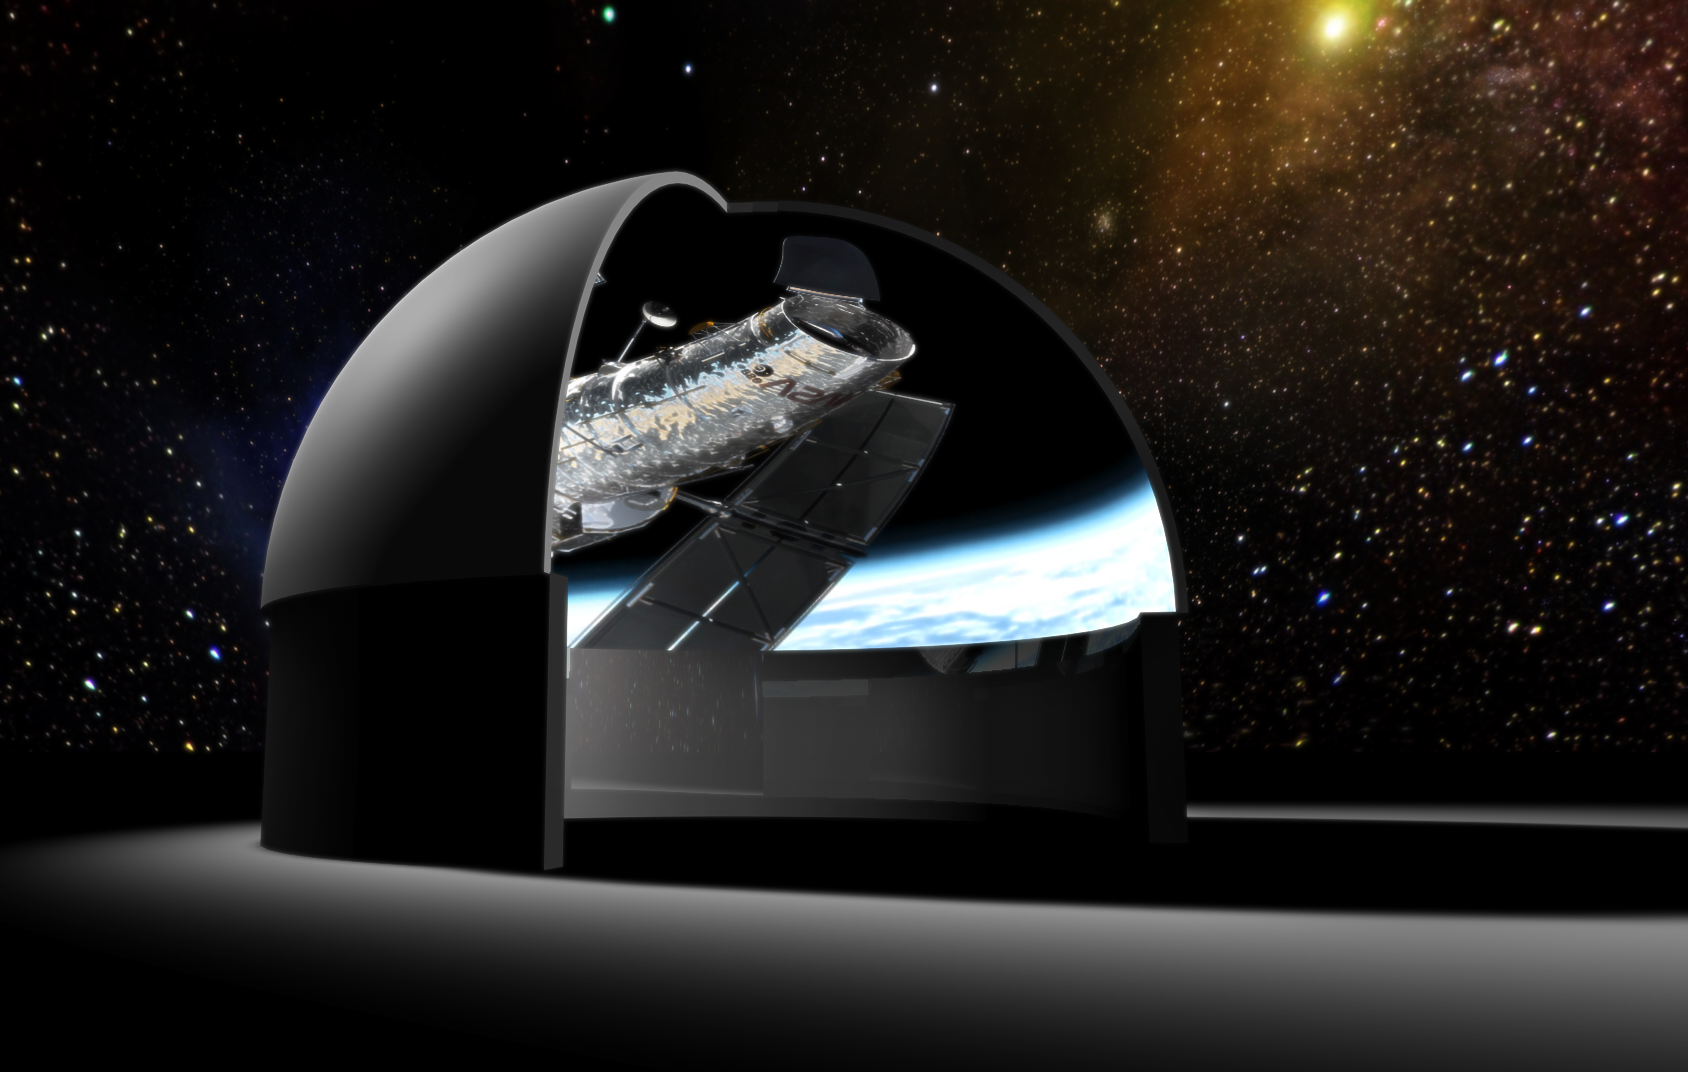

Fulldome archive released

ESA/Hubble has released the first comprehensive free digital archive with fulldome movies in the world. The movies are being used by planetaria worldwide in their planetarium shows. The format is 3600 pixels x 3600 pixels, lightly compressed single jpeg frames produced with with a 180 degrees fish-eye camera, or a standard 5 camera rig stitched together to a dome master. Some of the movies show Hubble images and some 3D animations. When shown on a big planetarium dome the Hubble images really come to their fullest expression, although some of the Hubble images contain even 10 times more pixels than can be shown even in these super high-res movies.

So far 26 movies have been released, and more will be added as the NASA/ESA Hubble Space Telescope makes new discoveries.

Credit: NASA & ESA